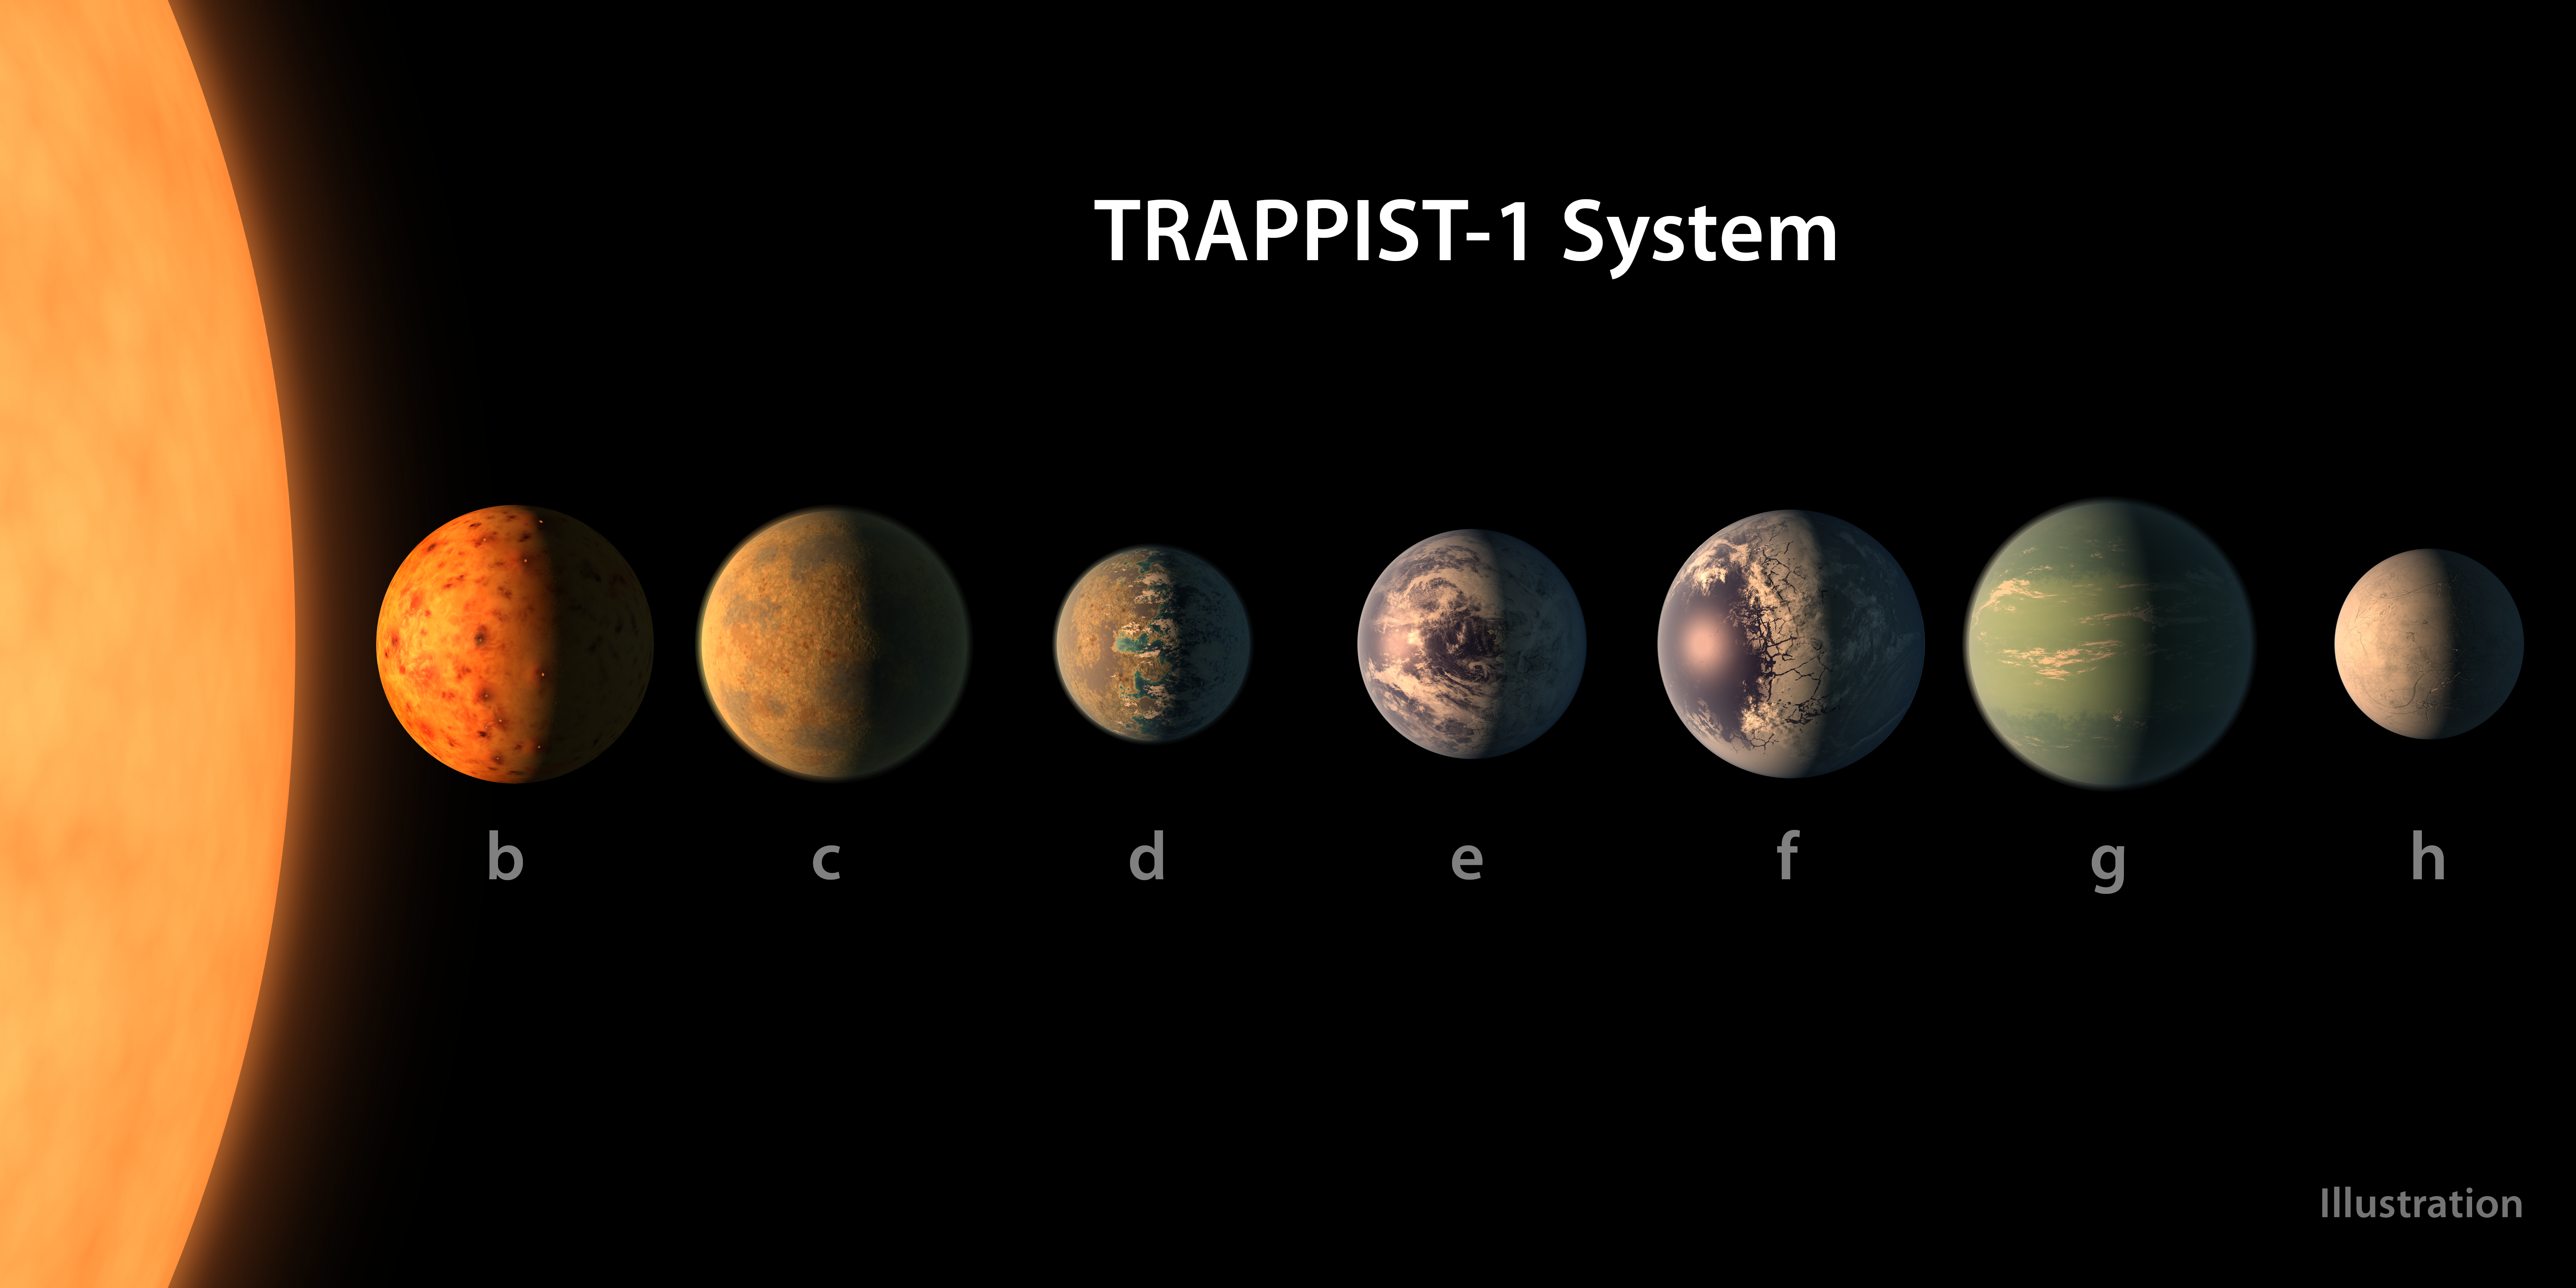

Comparing the TRAPPIST-1 planets

A size comparison of the planets of the TRAPPIST-1 system, lined up in order of increasing distance from their host star. The planetary surfaces are portrayed with an artist’s impression of their potential surface features, including water, ice, and atmospheres.

Credit: NASA/R. Hurt/T. Pyle